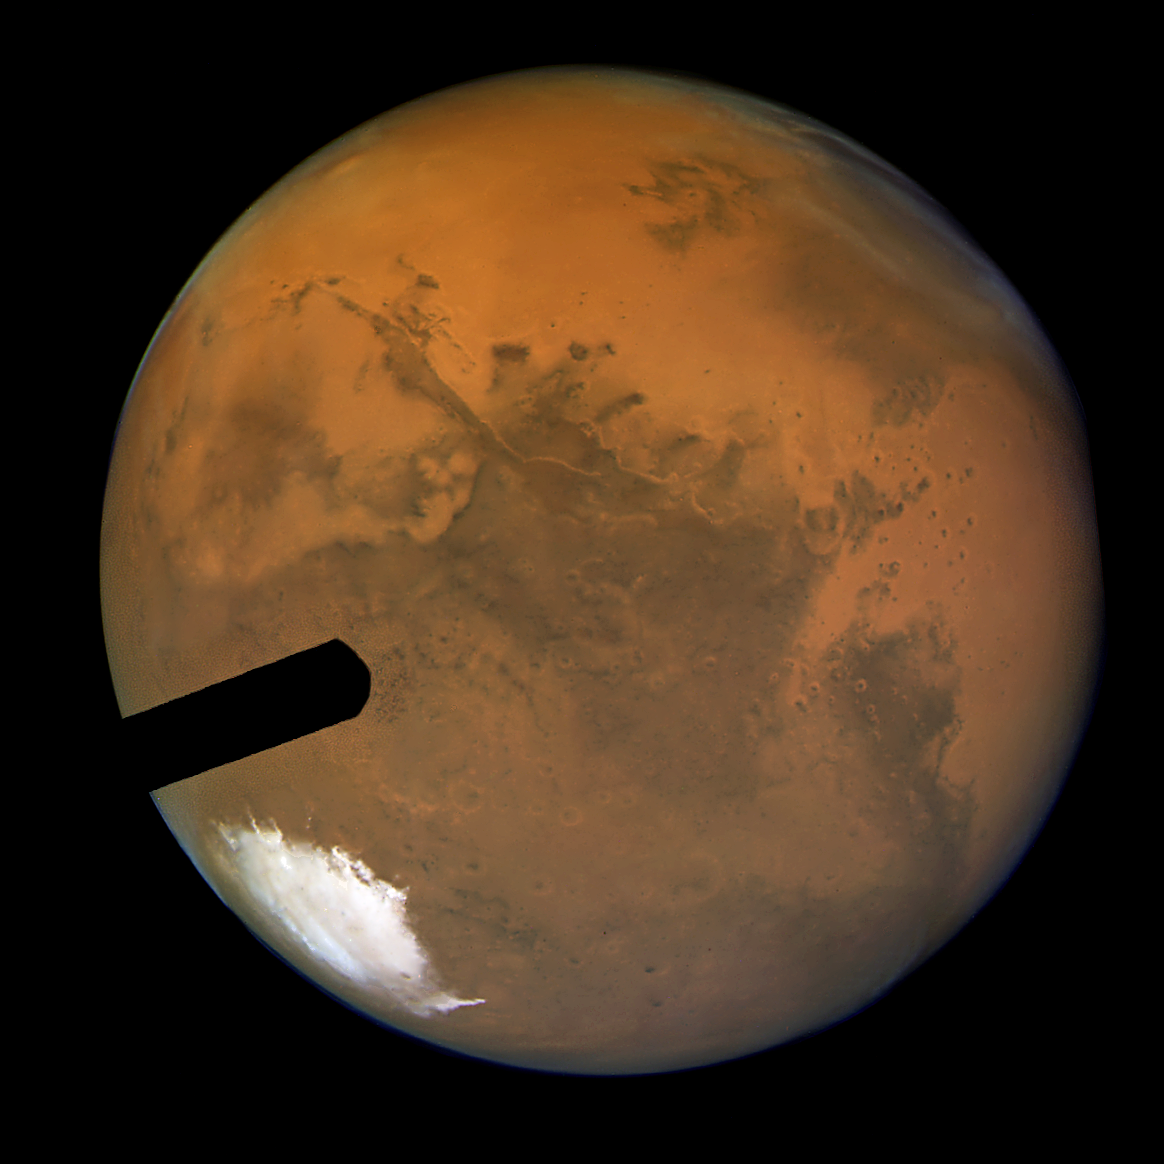

Hubble's sharpest ever colour view

This view of Mars, the sharpest photo ever taken from Earth, reveals small craters and other surface markings only about a dozen miles (a few tens of kilometres) across. (The spatial scale is 5 miles, or 8 kilometres per pixel). The Advanced Camera for Surveys (ACS) aboard NASA/ESA Hubble Space Telescope snapped this image on Aug. 24, just a few days before the red planet's historic "close encounter" with Earth.

Among the Martian surface features are: numerous craters; several large volcanoes of the great Tharsis plateau along the upper left limb; and a large multi-ring impact basin, called Argyre, near image center. These kinds of features from past and present NASA spacecraft that have orbited Mars are also being studied in detail. But they have never before been seen from Earth with this kind of clarity.

Credit: NASA/ESA, J. Bell (Cornell U.), and M. Wolff (Space Science Inst.) Additional image processing and analysis support from: K. Noll and A. Lubenow (STScI); M. Hubbard (Cornell U.); R. Morris (NASA/JSC); P. James (U. Toledo); S. Lee (U. Colorado); T. Clancy, B. Whitney and G. Videen (SSI); and Y. Shkuratov (Kharkov U.)